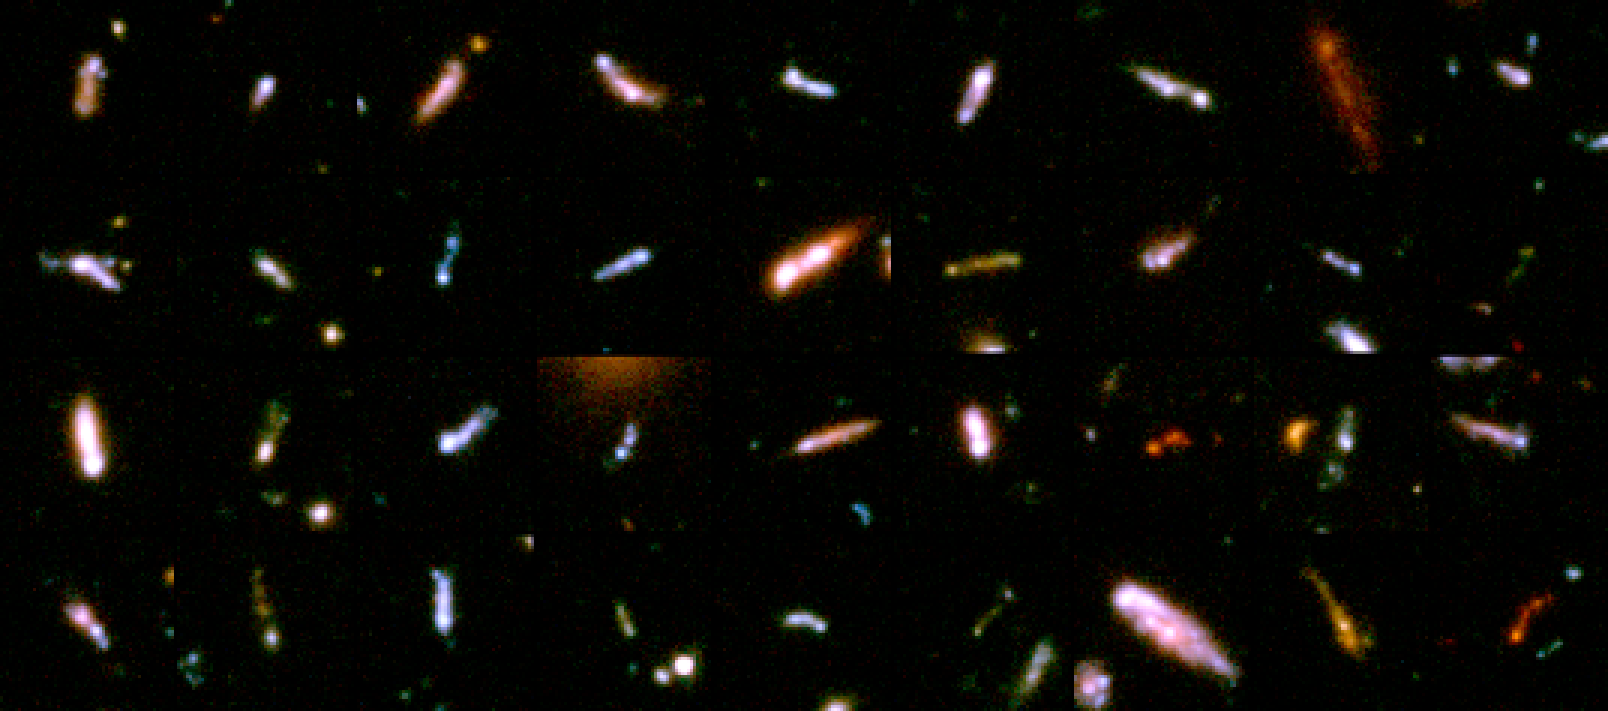

A Gallery of 'Tadpole Galaxies'

These postage-stamp-size images reveal 36 young galaxies caught in the act of merging with other galaxies. These galaxies appear as they existed many billions of years ago. Astronomers have dubbed them "tadpole galaxies" because of their distinct knot-and-tail shapes, which suggest that they are engaging in galactic mergers.

Credit: NASA, A. Straughn, S. Cohen, and R. Windhorst (Arizona State University), and the HUDF team ( Space Telescope Science Institute)